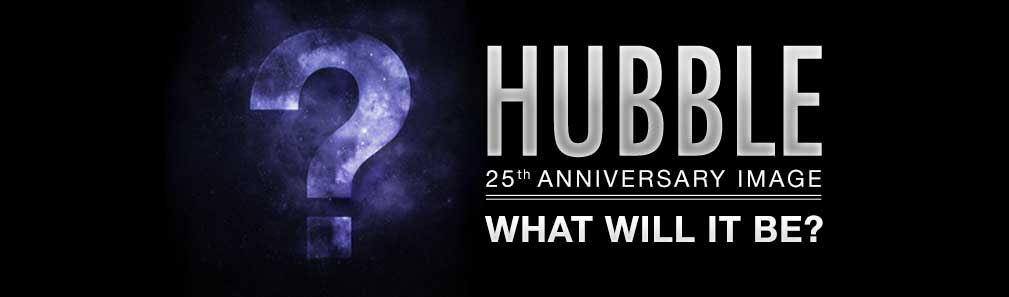

Unveiling the Hubble 25th anniversary image

To celebrate the NASA/ESA Hubble Space Telescope’s 25 years in orbit, ESA/Hubble is offering free large-format high-quality prints of Hubble’s stunning anniversary image.

More information and details on how to apply can be found on the Image Unveiling page of the ESA/Hubble website.

Credit: ESA, NASA